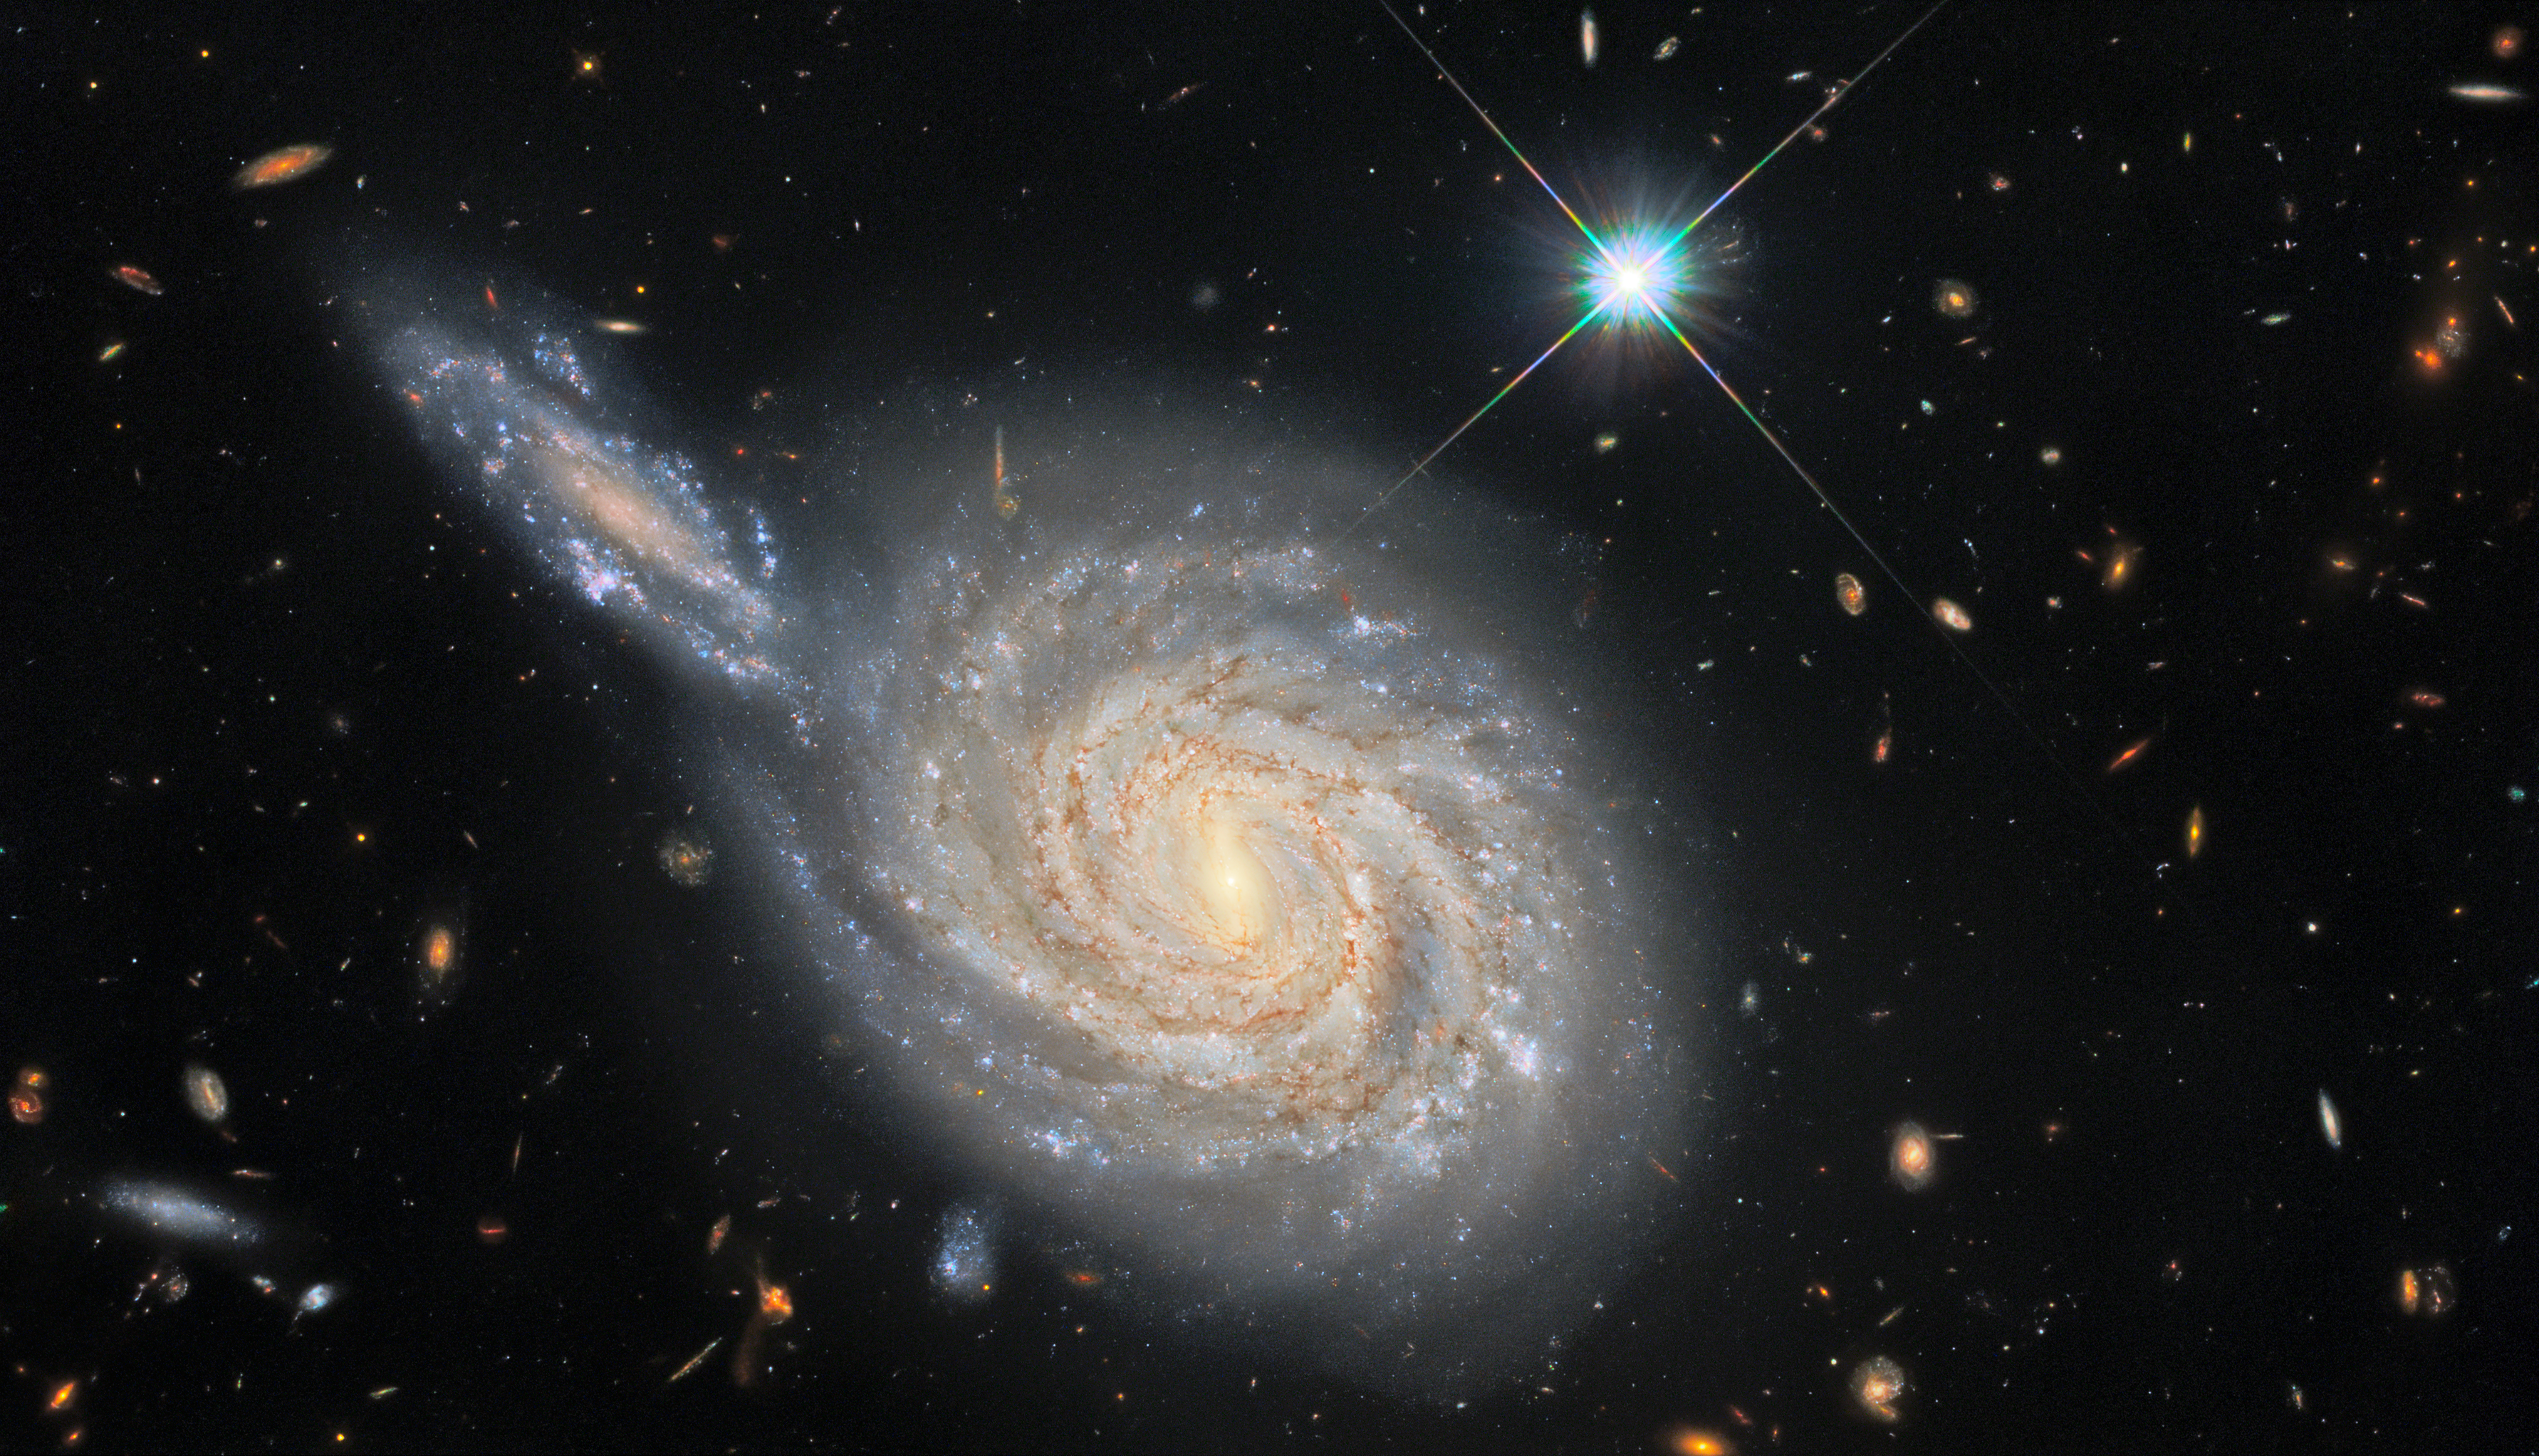

Galactic Conjunction

This image from the NASA/ESA Hubble Space Telescope captures the spiral galaxy NGC 105, which lies roughly 215 million light-years away in the constellation Pisces. While it looks like NGC 105 is plunging edge-on into a collision with a neighbouring galaxy, this is just the result of the chance alignment of the two objects in the night sky. NGC 105’s elongated neighbour is actually far more distant and remains relatively unknown to astronomers. These misleading conjunctions occur frequently in astronomy — for example, the stars in constellations are at vastly different distances from Earth, and only appear to form patterns thanks to the chance alignment of their component stars.

The Wide Field Camera 3 observations in this image are from a vast collection of Hubble measurements examining nearby galaxies which contain two fascinating astronomical phenomena — Cepheid variables and cataclysmic supernova explosions. Whilst these two phenomena may appear to be unrelated — one is a peculiar class of pulsating stars and the other is the explosion caused by the catastrophic final throes of a massive star’s life — they are both used by astronomers for a very particular purpose: measuring the vast distances to astronomical objects. Both Cepheids and supernovae have very predictable luminosities, meaning that astronomers can tell precisely how bright they are. By measuring how bright they appear when observed from Earth, these “standard candles” can provide reliable distance measurements. NGC 105 contains both supernovae and Cepheid variables, giving astronomers a valuable opportunity to calibrate the two distance measurement techniques against one another.

Astronomers recently carefully analysed the distances to a sample of galaxies including NGC 105 to measure how fast the Universe is expanding — a value known as the Hubble constant. Their results don’t agree with the predictions of the most widely-accepted cosmological model, and their analysis shows that there is only a 1-in-a-million chance that this discrepancy was caused by measurement errors. This discrepancy between galaxy measurements and cosmological predictions has been a long-standing source of consternation for astronomers, and these recent findings provide persuasive new evidence that something is either wrong or lacking in our standard model of cosmology.

Credit: ESA/Hubble & NASA, D. Jones, A. Riess et al. Acknowledgement: R. Colombari